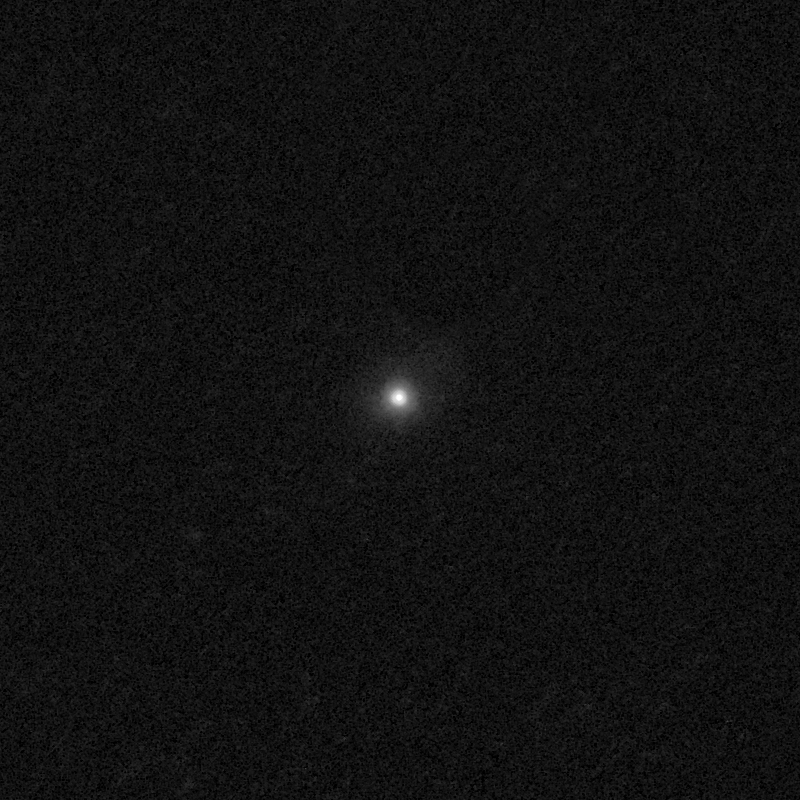

Outflows from merging galaxy J2140+1209

This NASA/ESA Hubble Space Telescope image of the galaxy J2140+1209 shows it is undergoing a firestorm of star birth, as shown by its bright white cores.

This star-making frenzy was ignited by mergers with other galaxies. The odd shape of the galaxy is telltale evidence of a close encounters.

The new Hubble Wide Field Camera 3 observations of this and eleven other galaxies undergoing the same process suggest that energy from the star-birthing frenzies created powerful winds that are blowing out the gas, meaning it is not available to form future generations of stars.

This activity occurred when the Universe was half its current age of 13.7 billion years. The gas-poor galaxies may eventually become so-called red and dead galaxies, composed only of aging stars.

This Hubble false-colour image was processed to bring out important details in the galaxy. The images were taken in 2010.

Credit: NASA, ESA, and P. Sell (Texas Tech University)